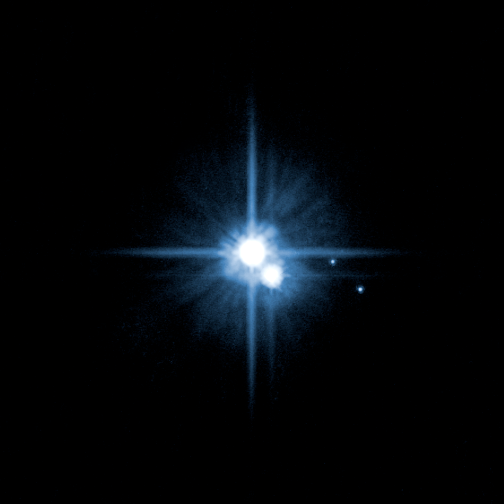

The Pluto system on Feb. 15, 2006 (non-annotated)

Anxiously awaited follow-up observations with the NASA/ESA Hubble Space Telescope have confirmed the presence of two new moons around the distant planet Pluto. The moons were first discovered by Hubble in May 2005, but the science team probed even deeper into the Pluto system last week to look for additional satellites and to characterize the orbits of the moons.

Credit: NASA, ESA, H. Weaver (JHU/APL), A. Stern (SwRI), and the HST Pluto Companion Search Team